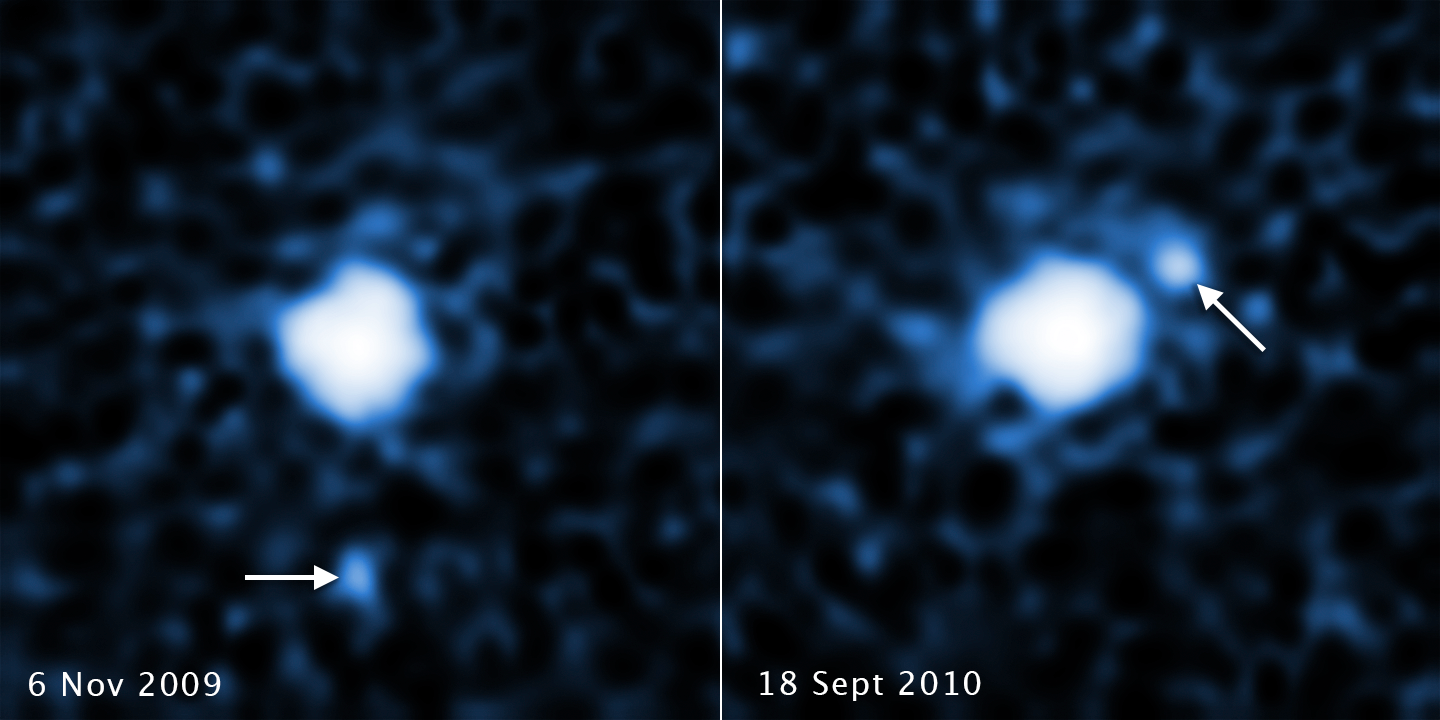

Moon Around the Trans-Neptunian object 2007 OR10

These two images, taken a year apart, reveal a moon orbiting the trans-Neptunian object 2007 OR10. Each image, taken by the NASA/ESA Hubble Space Telescope's Wide Field Camera 3, shows the companion in a different orbital position around its parent body.

2007 OR10 is the third-largest known trans-Neptunian object, behind Pluto and Eris, and the largest unnamed world in the Solar System. The pair is located in the Kuiper Belt, a realm of icy debris left over from the formation of the Solar System.

The trans-Neptunian object is about 1520 kilometres across; the moon is estimated to be 240 kilometres to 400 kilometres in diameter. 2007 OR10, like Pluto, follows an eccentric orbit, but it is currently three times farther than Pluto is from the Sun.

Credit: NASA, ESA, C. Kiss (Konkoly Observatory), and J. Stansberry (STScI)